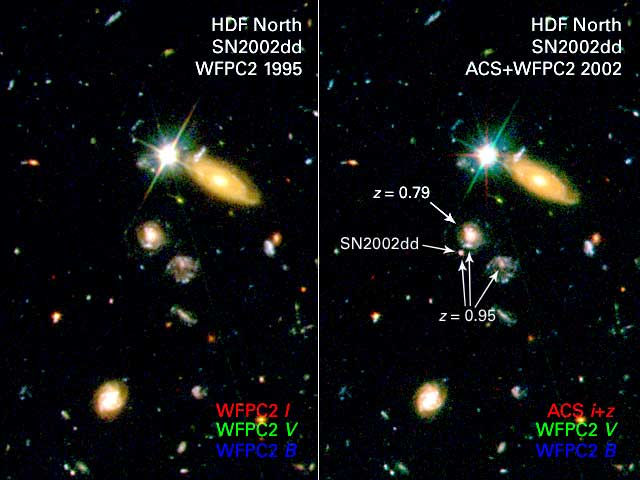

WFPC2/ACS composite, before and during SN with labels

[Left] - A Hubble Space Telescope image of a portion of the Hubble Deep Field North as originally photographed in 1995 with the Wide Field Planetary Camera 2. [Right] - A composite image of the same field as imaged by Hubble's Advanced Camera for Surveys (ACS), combined with the original WFPC2 image. The ACS observations were made in May and June 2002. The red spot is the glow of a very distant supernova captured exploding in the field. The supernova is estimated to be 8 billion light-years away. The supernova appears deep red in this composite image because it was photographed by the ACS at far-red wavelengths. Distant supernovae are used by astronomers to fill in the blank region where the universe's rate of expansion switched from deceleration due to gravity to acceleration due to the repulsive force of 'dark energy.'

Credit: NASA/ESA, J. Blakeslee (JHU) and Z. Levay (STScI)